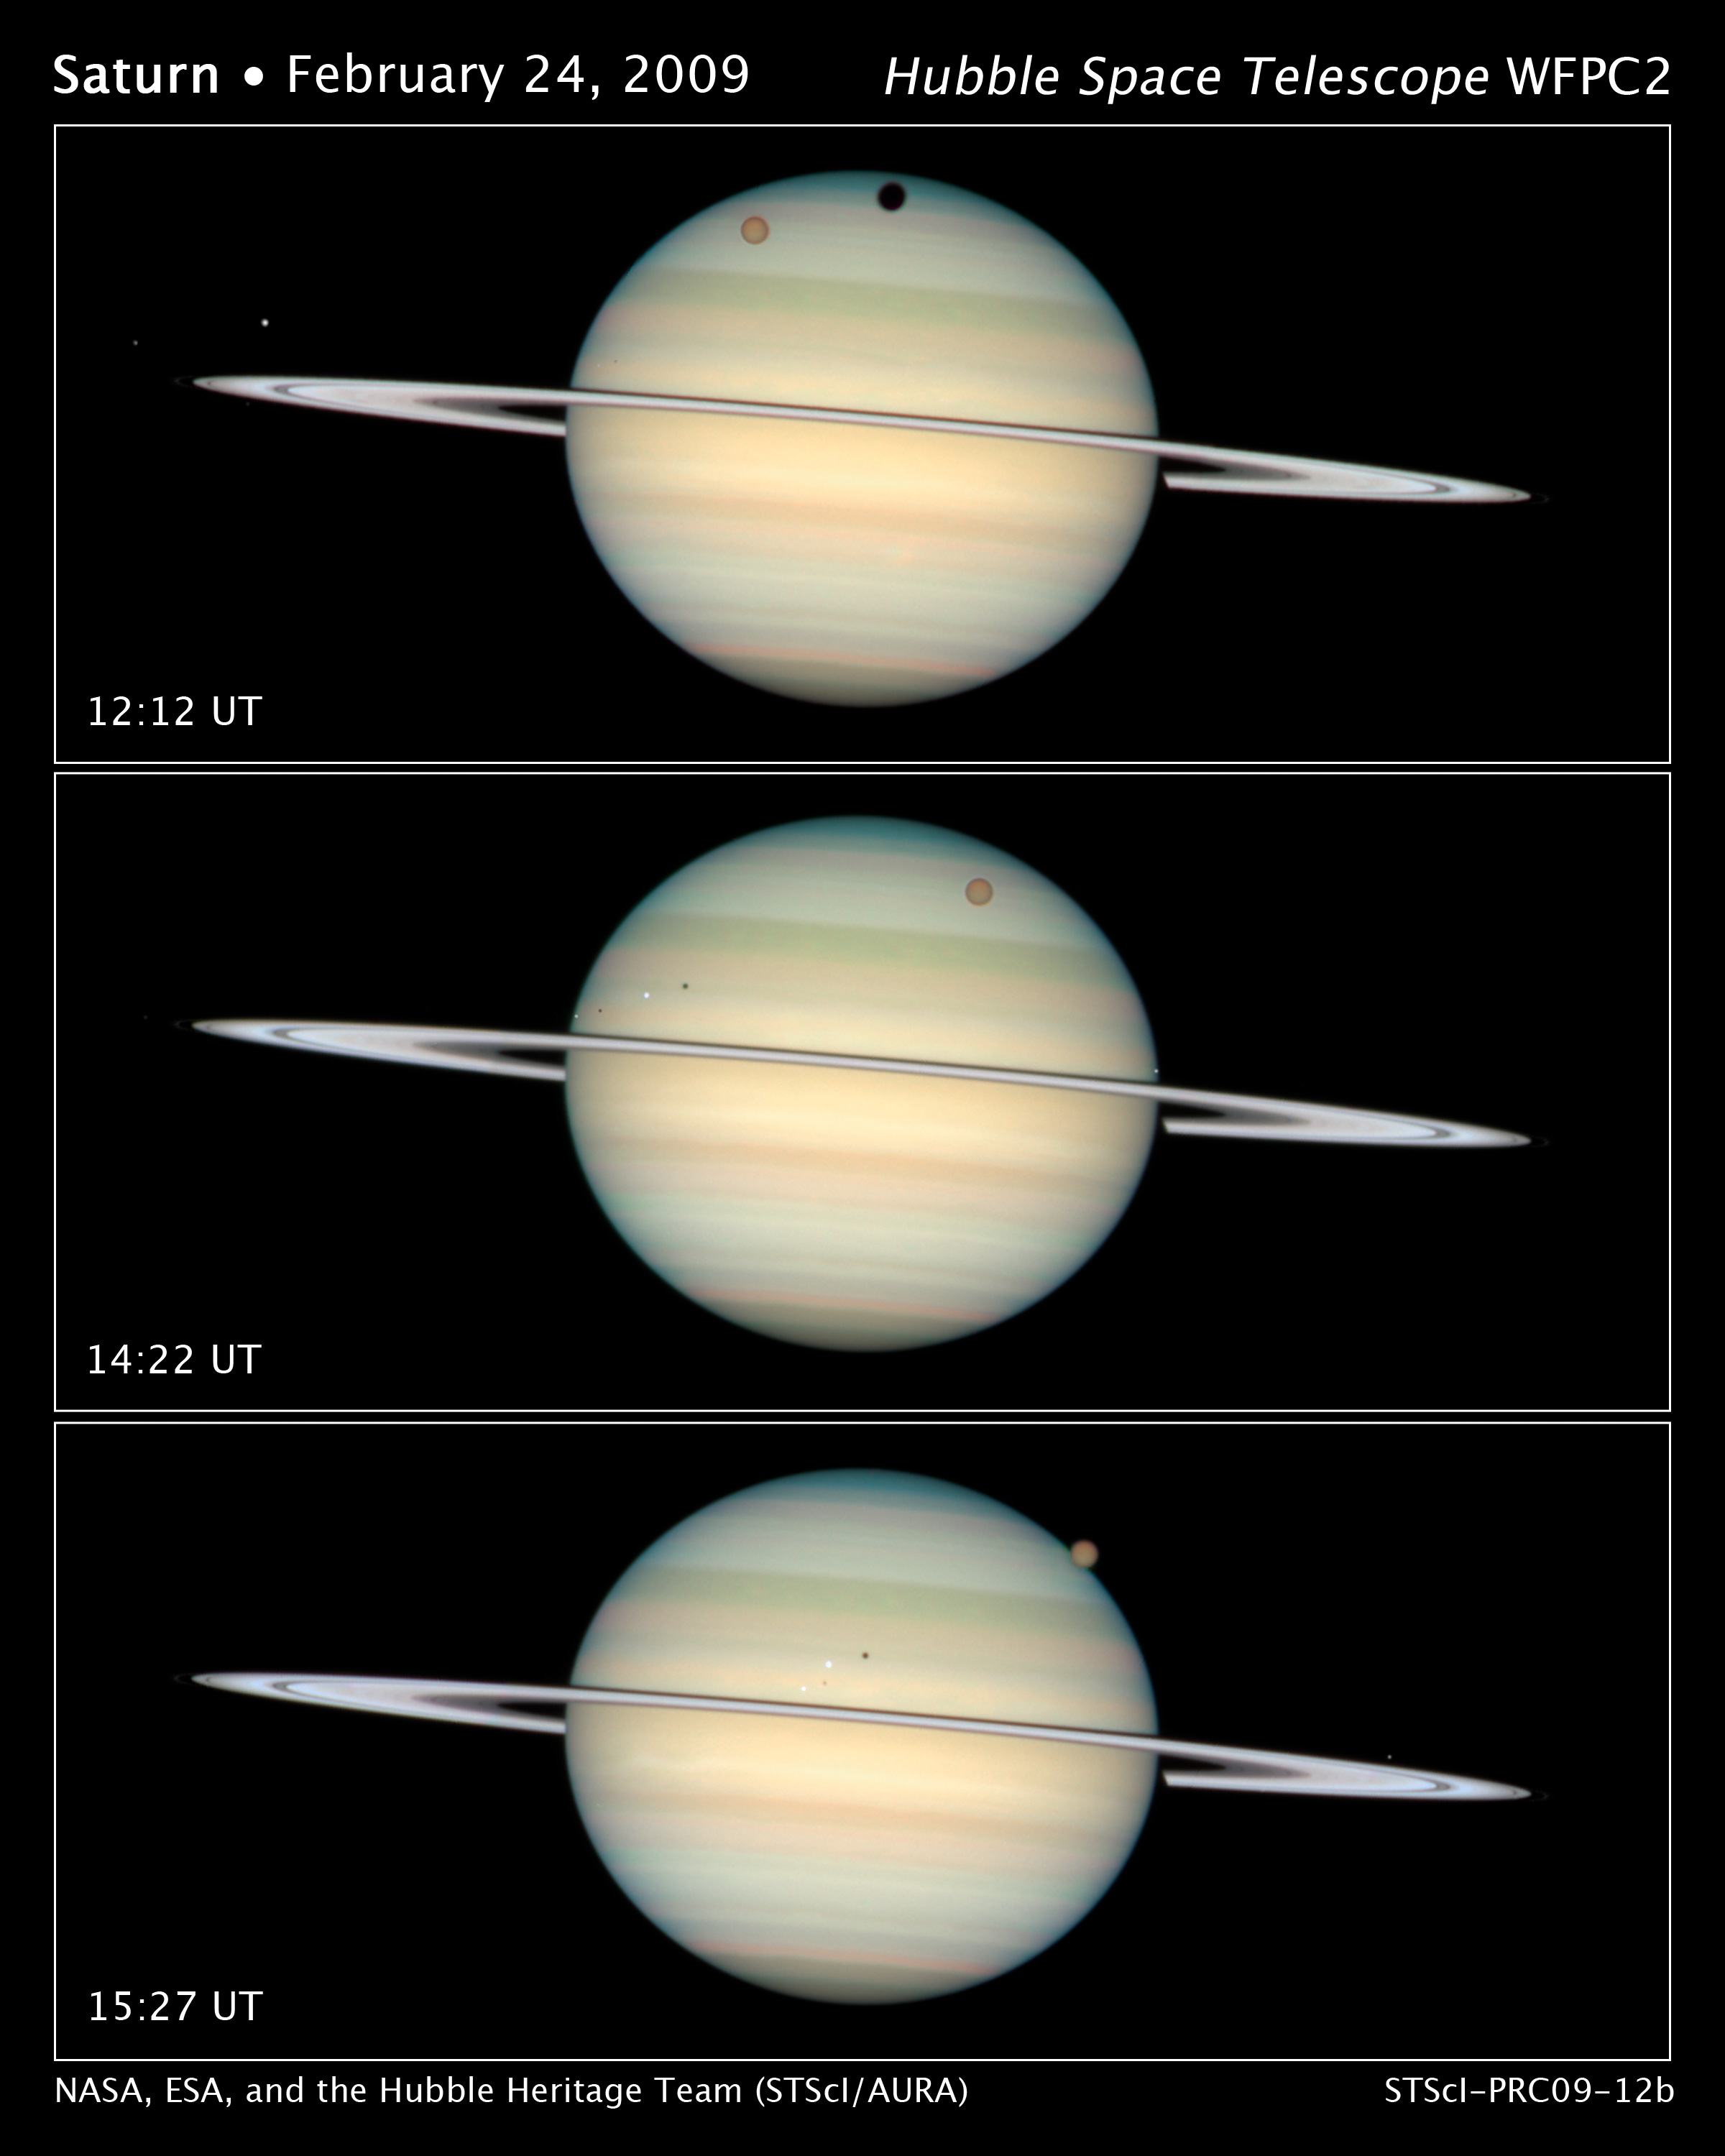

Quadruple Saturn moon transit snapped by Hubble

This sequence of images captures the parade of several of Saturn's moons transiting the face of the gas giant planet. This is a rare event because the rings are tilted edge on to Earth every 15 years. The top frame captures the giant moon Titan and its shadow near Saturn's northern polar hood. Dione, the brightest of the icy moons in this view — which are closer in to Saturn — can easily be traced crossing the disc from far left to image centre. In the centre frame, the smaller moon Enceladus can be seen near the western limb of Saturn. This picture sequence was taken with Hubble's Wide Field Planetary Camera 2 on February 24, 2009, when Saturn was at a distance of roughly 1.25 billion kilometers from Earth. Hubble can see details as small as 300 km across on Saturn.

Credit: NASA, ESA and the Hubble Heritage Team (STScI/AURA). Acknowledgment: M. Wong (STScI/UC Berkeley) and C. Go (Philippines)